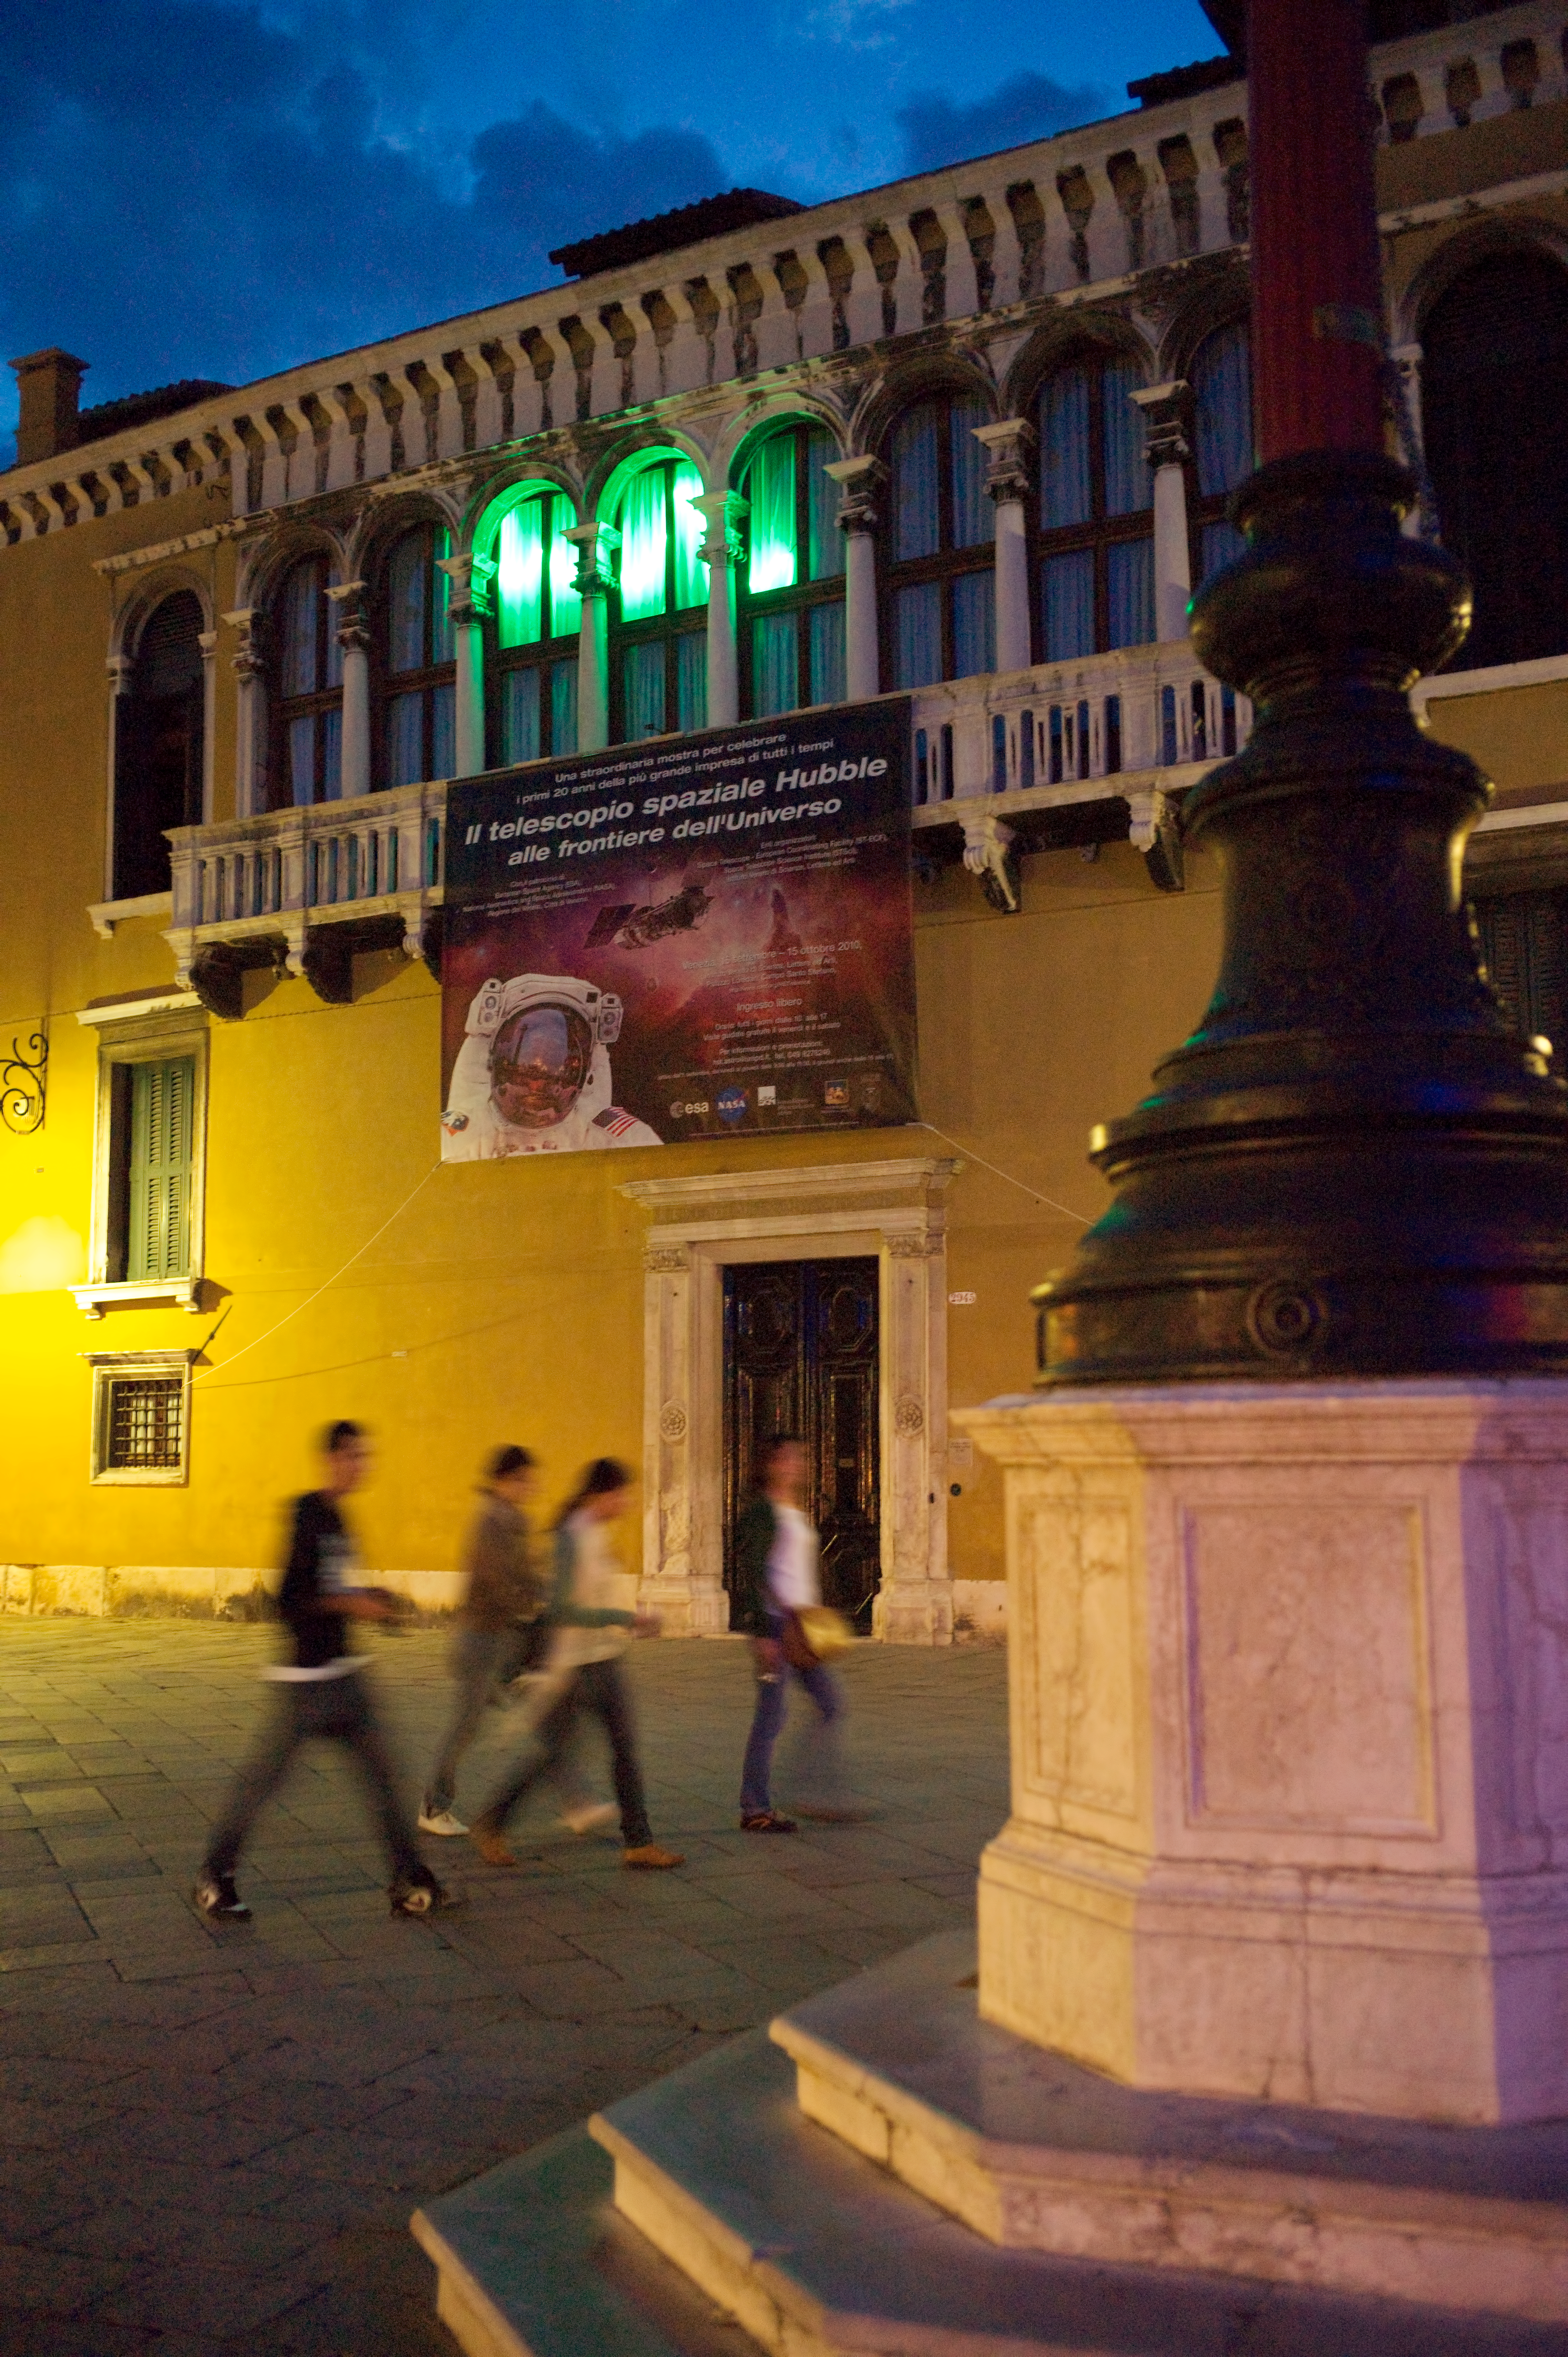

Testing a laser in Venice

This image of Venice’s Palazzo Loredan (venue of the “Il telescopio spaziale Hubble alle frontiere dell’universo” exhibition in October 2010) with windows lit up from inside with green laser light. This test was in preparation for the laser art installation “From the Distant Past”, devised by artist Tim Otto Roth, which was projected on the façade of the nearby Palazzo Franchetti.

Credit: ESA/Hubble